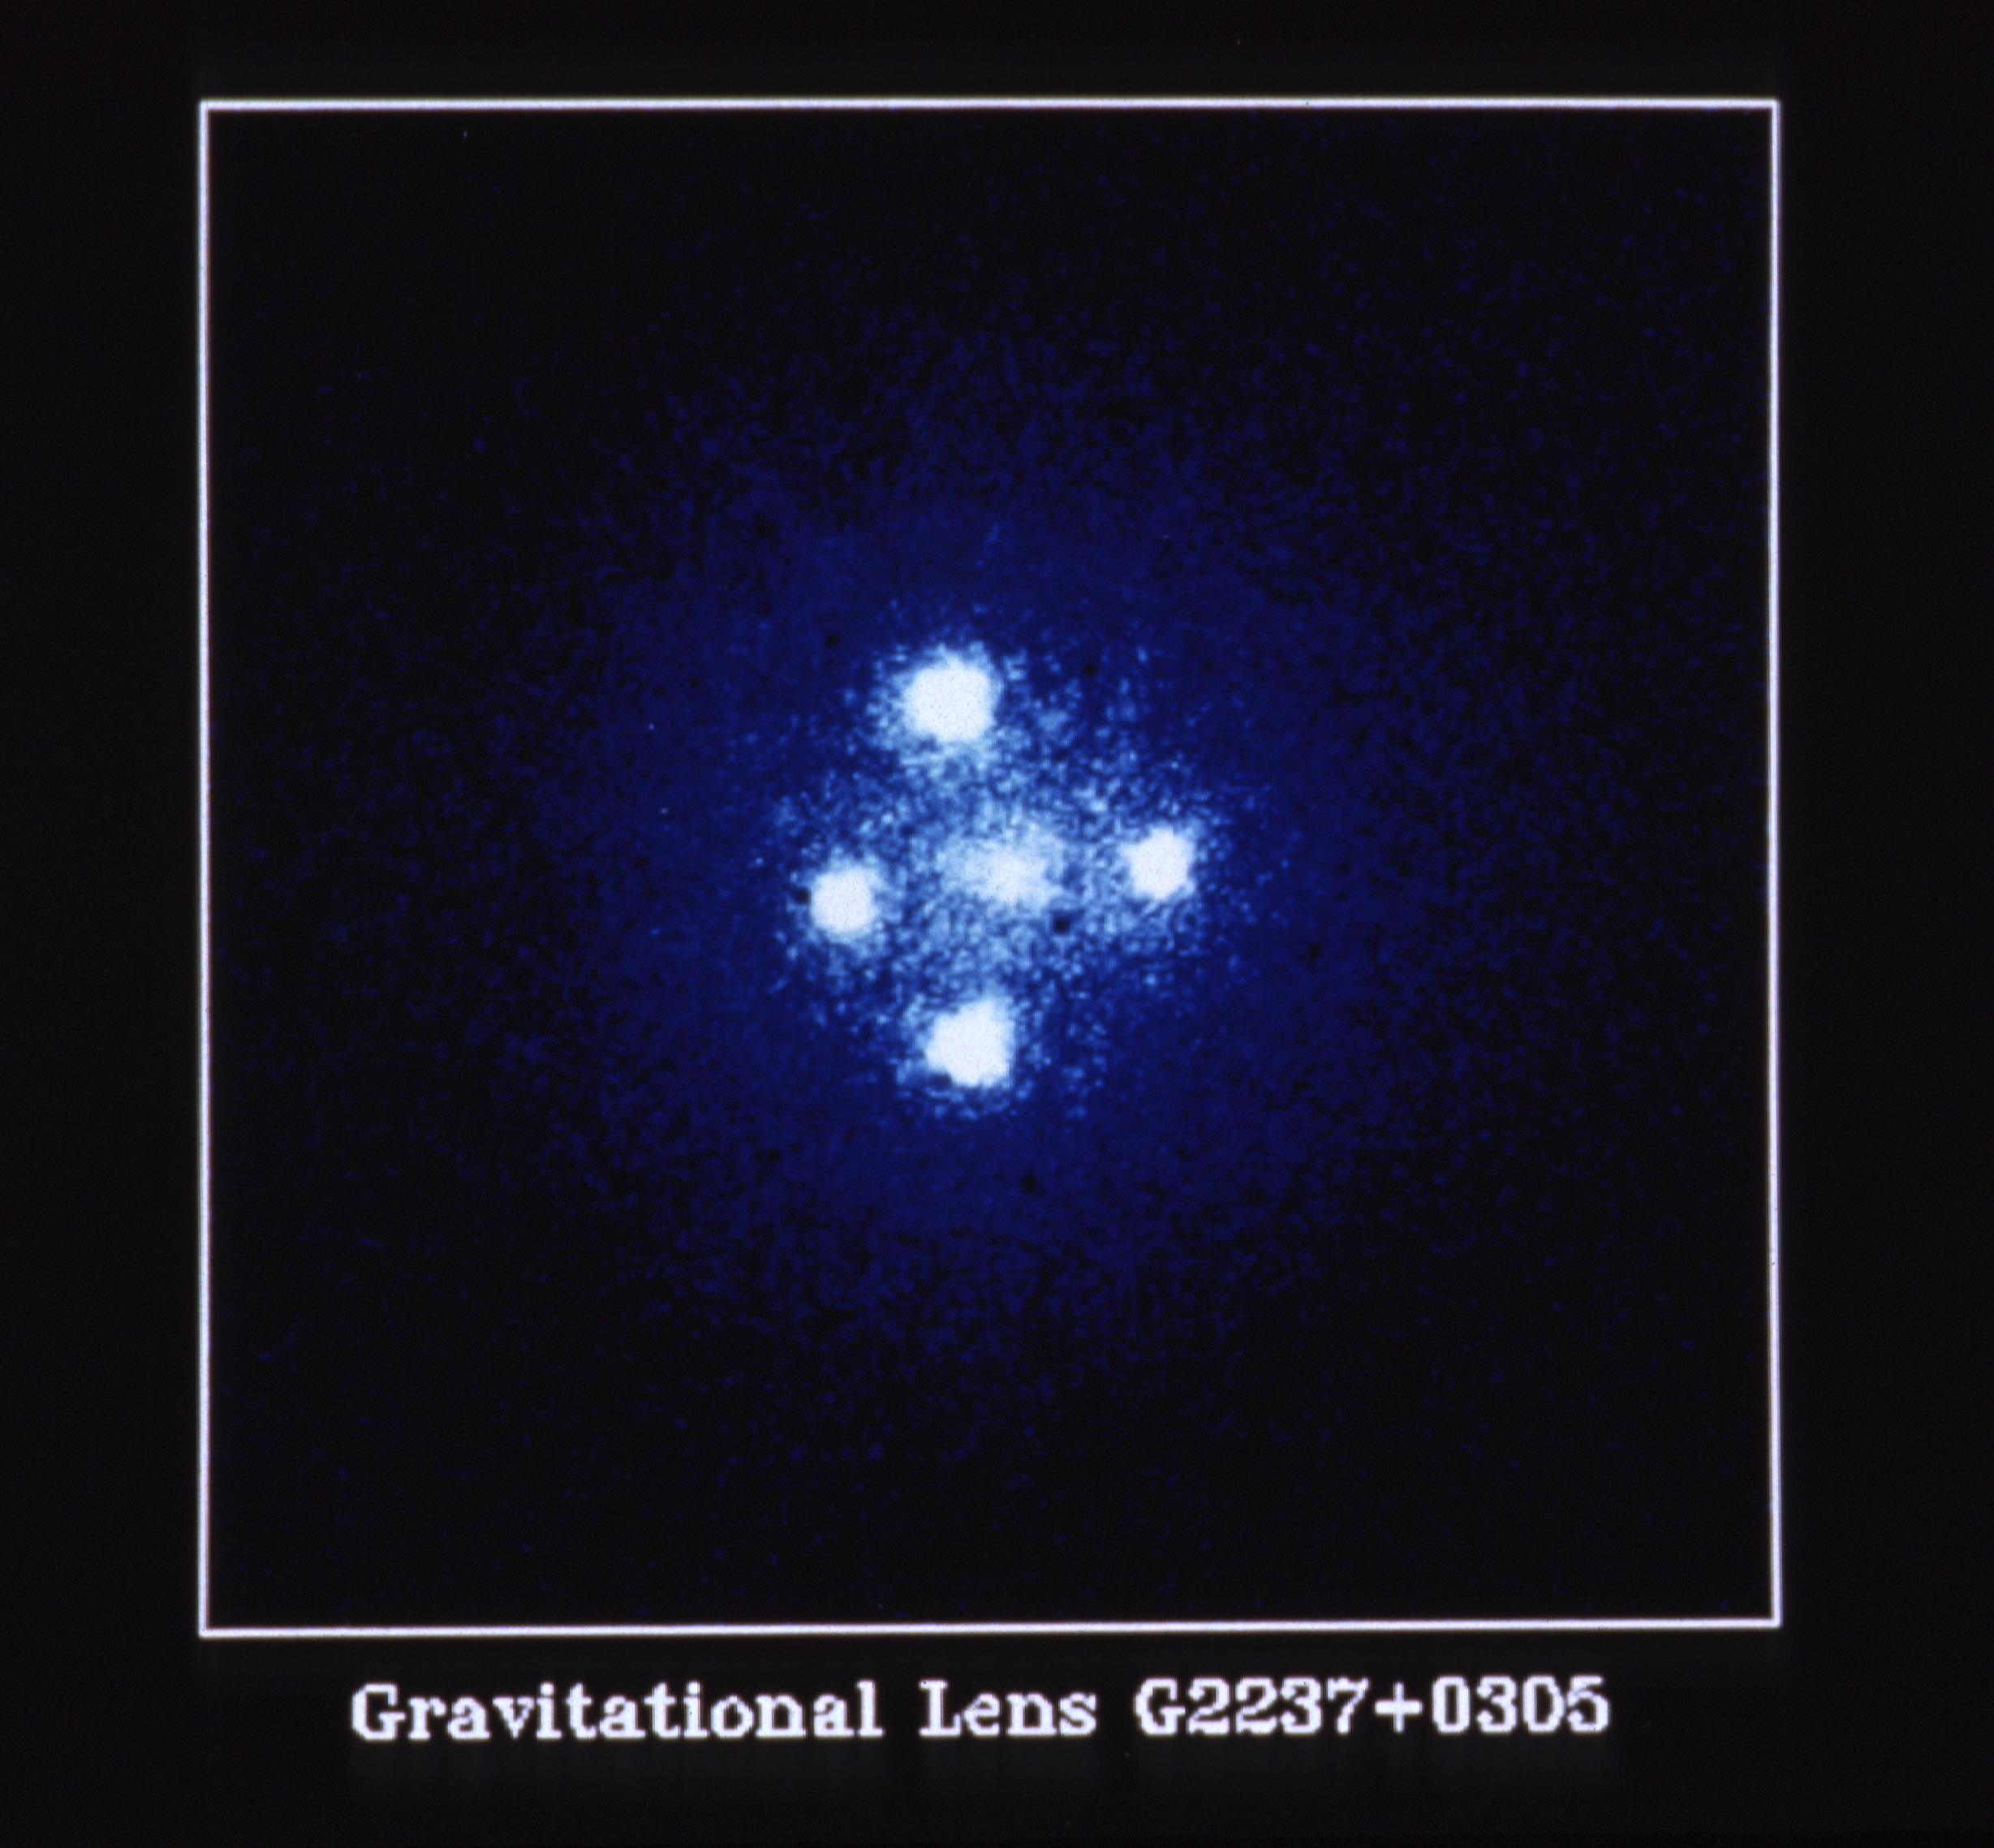

The Gravitational Lens G2237 + 0305

The European Space Agency's Faint Object Camera on board NASA/ESA Hubble Space Telescope has provided astronomers with the most detailed image ever taken of the gravitational lens G2237 + 0305, sometimes referred to as the "Einstein Cross". The photograph shows four images of a very distant quasar which has been multiple-imaged by a relatively nearby galaxy acting as a gravitational lens. The angular separation between the upper and lower images is 1.6 arc seconds.

The quasar seen here is at a distance of approximately 8 billion light years, whereas the galaxy at a distance of 400 million light years is 20 times closer. The light from the quasar is bent in its path by the gravitational field of the galaxy. This bending has produced the four bright outer images seen in the photograph. The bright central region of the galaxy is seen as the diffuse central object.

Credit: NASA & ESA